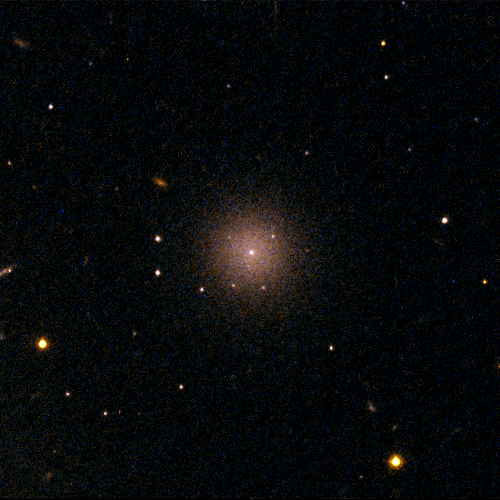

Perseus Dwarf Galaxy [CGW2003] J031900.4+4129

This object, [CGW2003] J031900.4+4129, is one of four dwarf galaxies that is part of a census of small galaxies in the tumultuous heart of the nearby Perseus galaxy cluster.

The galaxies appear smooth and symmetrical, suggesting that they have not been tidally disrupted by the pull of gravity in the dense cluster environment. Larger galaxies around them, however, are being ripped apart by the gravitational tug of other galaxies.

The image, taken in 2005 by NASA/ESA’s Hubble Space Telescope, is an evidence that the undisturbed galaxies are enshrouded by a "cushion" of dark matter, which protects them from their rough-and-tumble neighborhood.

Credit: NASA, ESA and C. Conselice (University of Nottingham, U.K.)